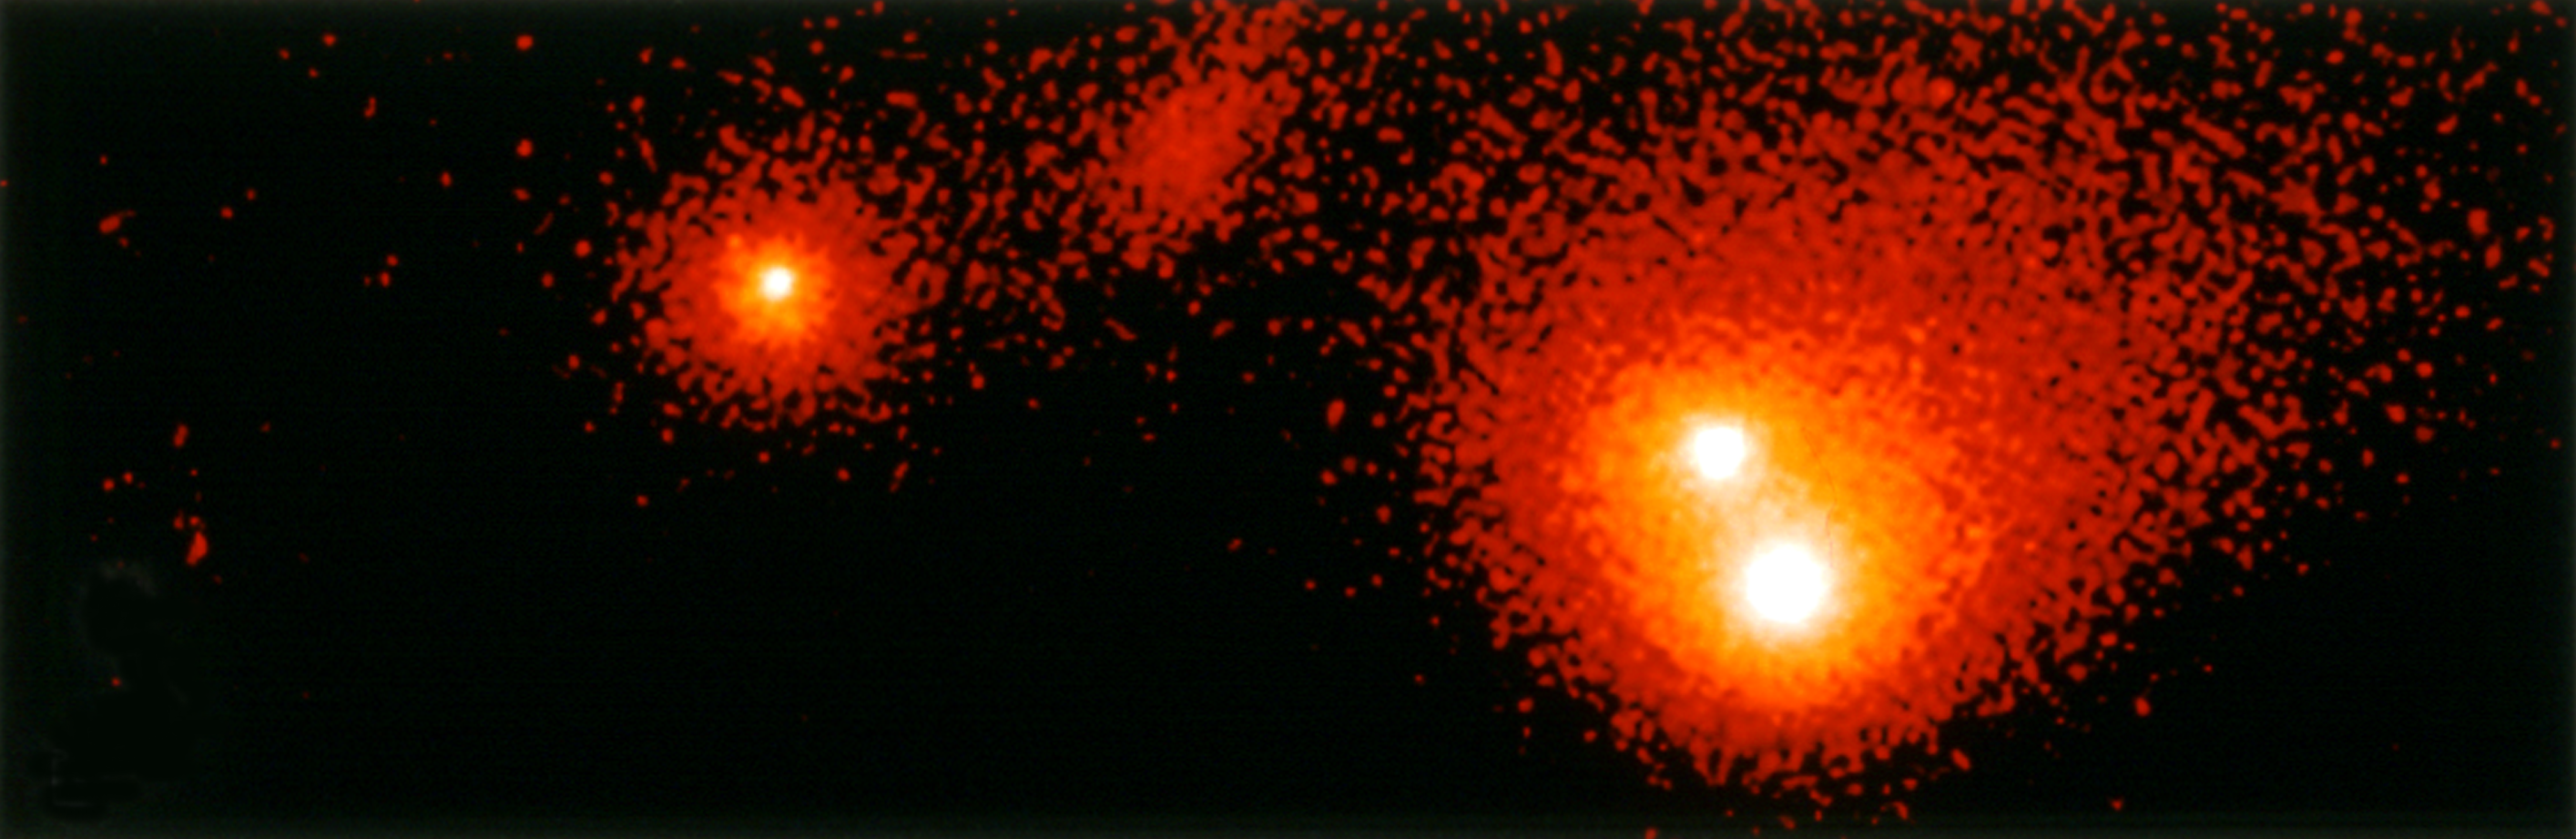

Shoemaker-Levy 9

This Hubble Space Telescope image shows the P-Q complex, also called the "gang of four' region, of Comet P/Shoemaker-Levy 9. It was taken on 17 May 1994 with the WFPC2 (in “wide field” mode).

Credit: Dr. H. A. Weaver, Mr. T. E. Smith, and Mr. K. B. Jones (STScI), and NASA